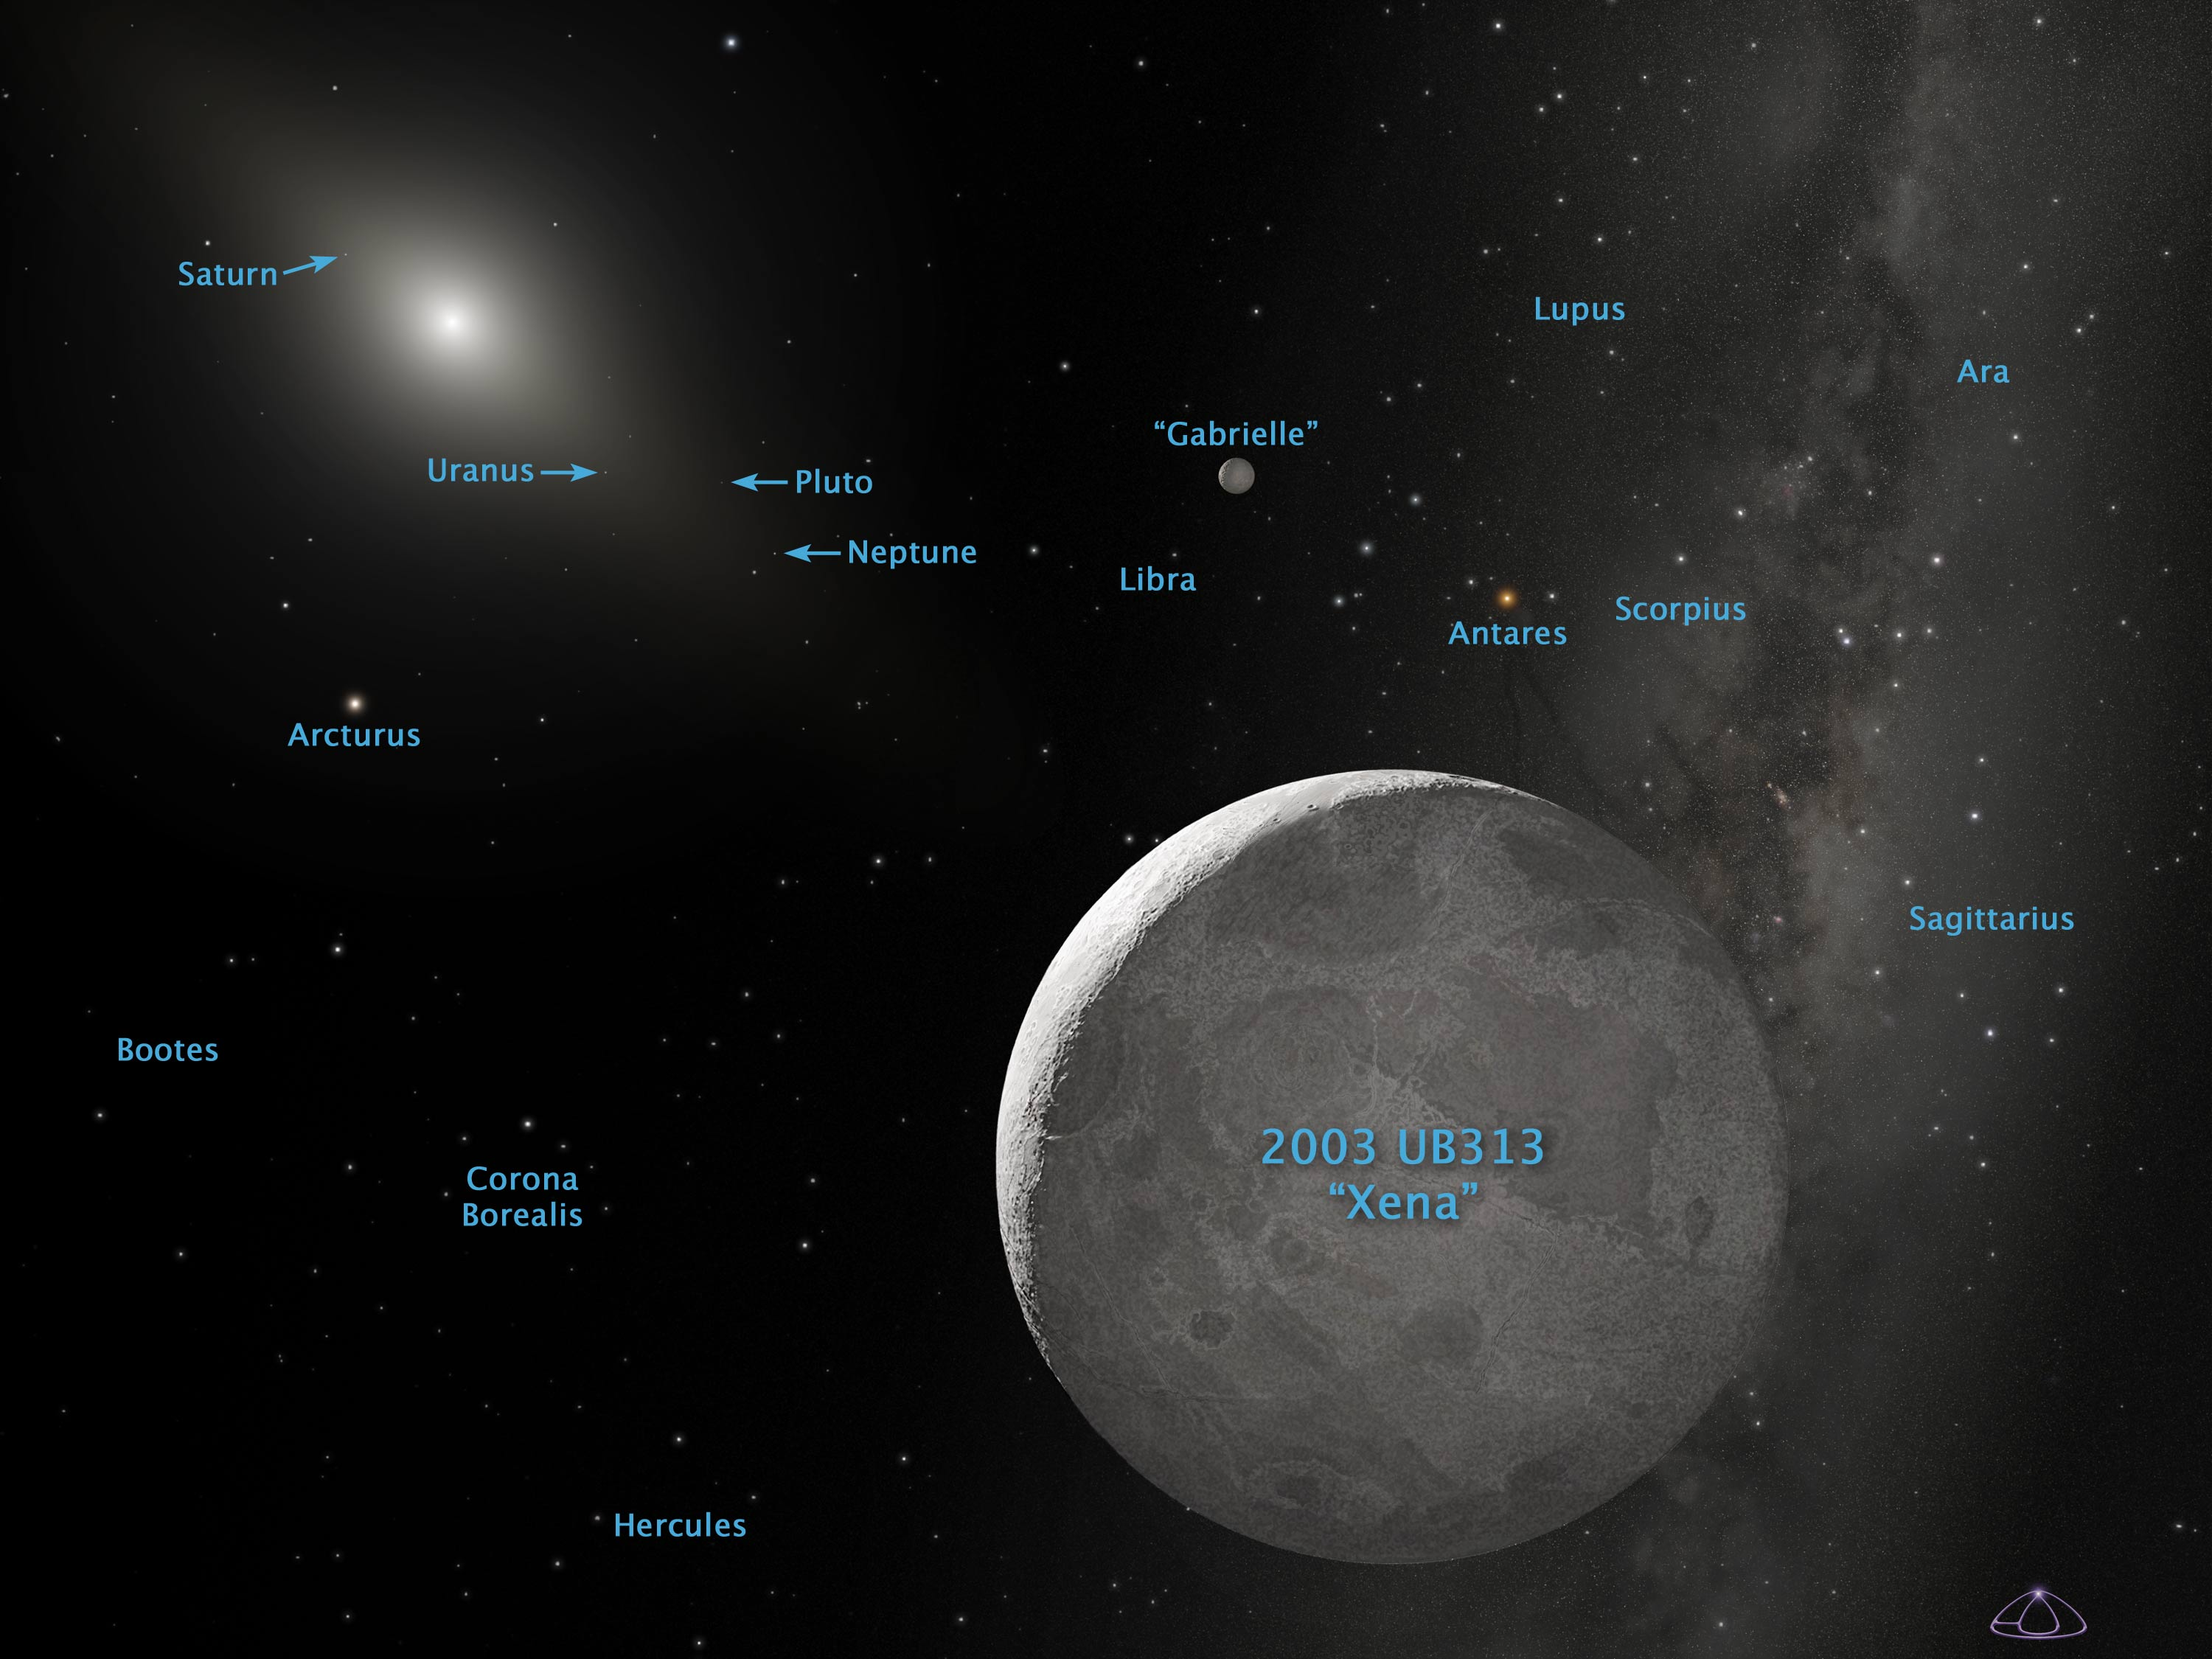

Artist's Concept of Kuiper Belt Object 2003 UB313 (Annotated)

This is an artist's concept of Kuiper Belt object 2003 UB313 (nicknamed Xena) and its satellite Gabrielle. NASA/ESA Hubble Space Telescope observed Xena with the Advanced Camera for Surveys on Dec. 9 and 10, 2005. The Hubble measurements of Xena yielded a diameter of 1,490 miles with an uncertainty of 60 miles (about 2400 kilometres with an uncertainty of 100 kilometres). Pluto's diameter is only 1,422 miles (or 2,288 kilometres).

Credit: NASA, ESA, and A. Schaller (for STScI)